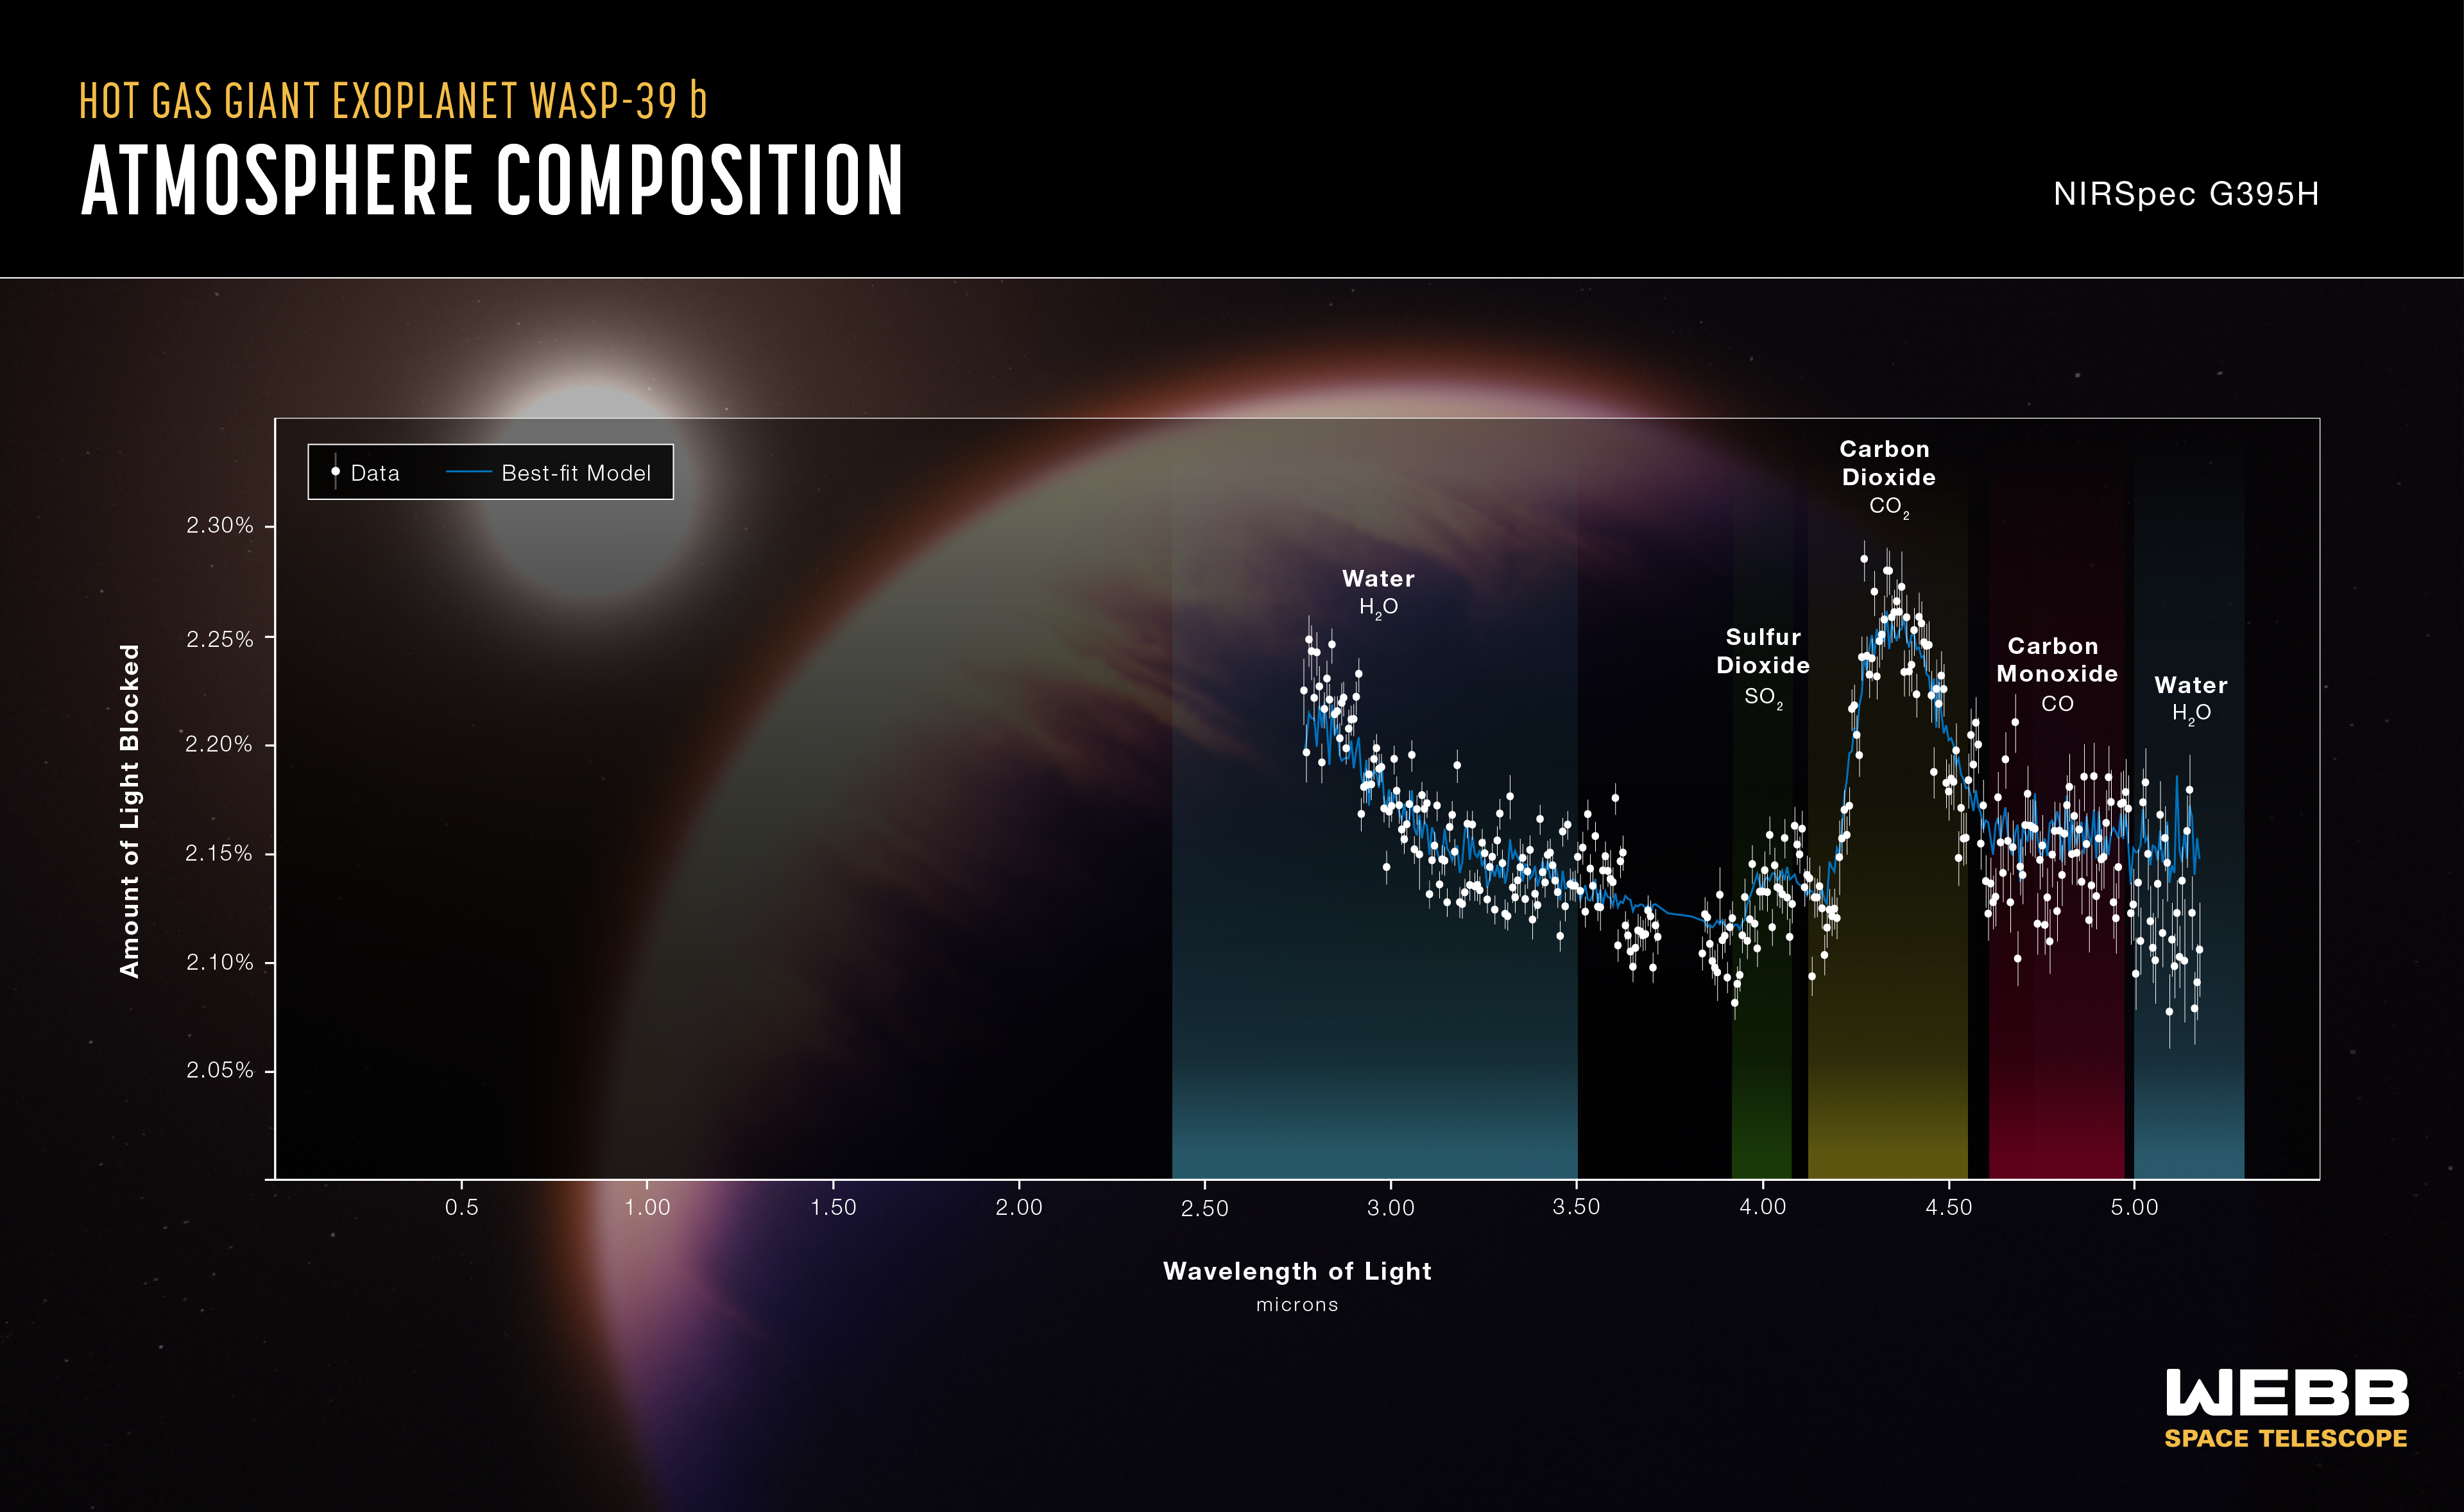

WASP-39 b Atmospheric Composition (NIRSpec G395H)

The atmospheric composition of the hot gas giant exoplanet WASP-39 b has been revealed by the NASA/ESA/CSA James Webb Space Telescope.

A transmission spectrum is made by comparing starlight filtered through a planet’s atmosphere as it moves in front of the star, to the unfiltered starlight detected when the planet is beside the star. Each of the data points (white circles) on these graphs represents the amount of a specific wavelength of light that is blocked by the planet and absorbed by its atmosphere. Wavelengths that are preferentially absorbed by the atmosphere appear as peaks in the transmission spectrum.

The blue line is a best-fit model that takes into account the data, the known properties of WASP-39 b and its star (e.g., size, mass, temperature), and assumed characteristics of the atmosphere. Researchers can vary the parameters in the model – changing unknown characteristics like cloud height in the atmosphere and abundances of various gases – to get a better fit and further understand what the atmosphere is really like.

This graph displays data from Webb's NIRSpec instrument, indicating signatures of water, sulfur dioxide (SO2), carbon dioxide (CO2), and carbon monoxide (CO).

Credit: NASA, ESA, CSA, J. Olmsted (STScI)